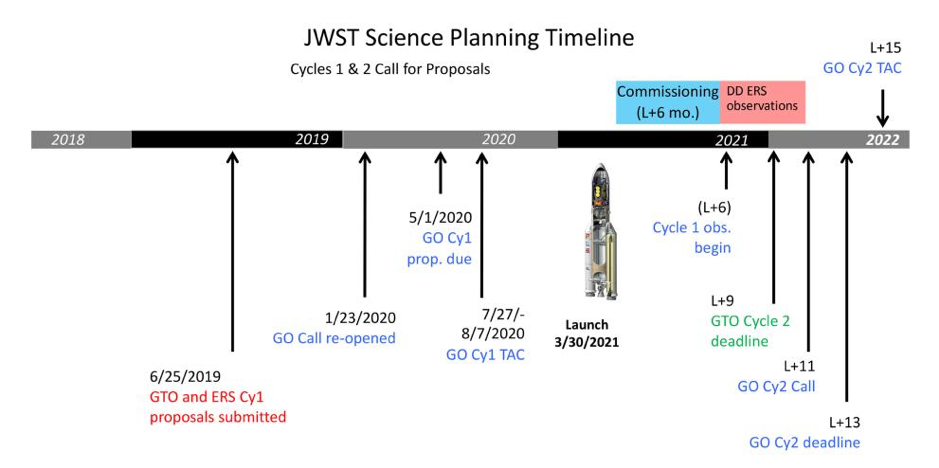

JWST Science Planning Timeline

JWST Science Planning Timeline.

Credit: NASA & ESA